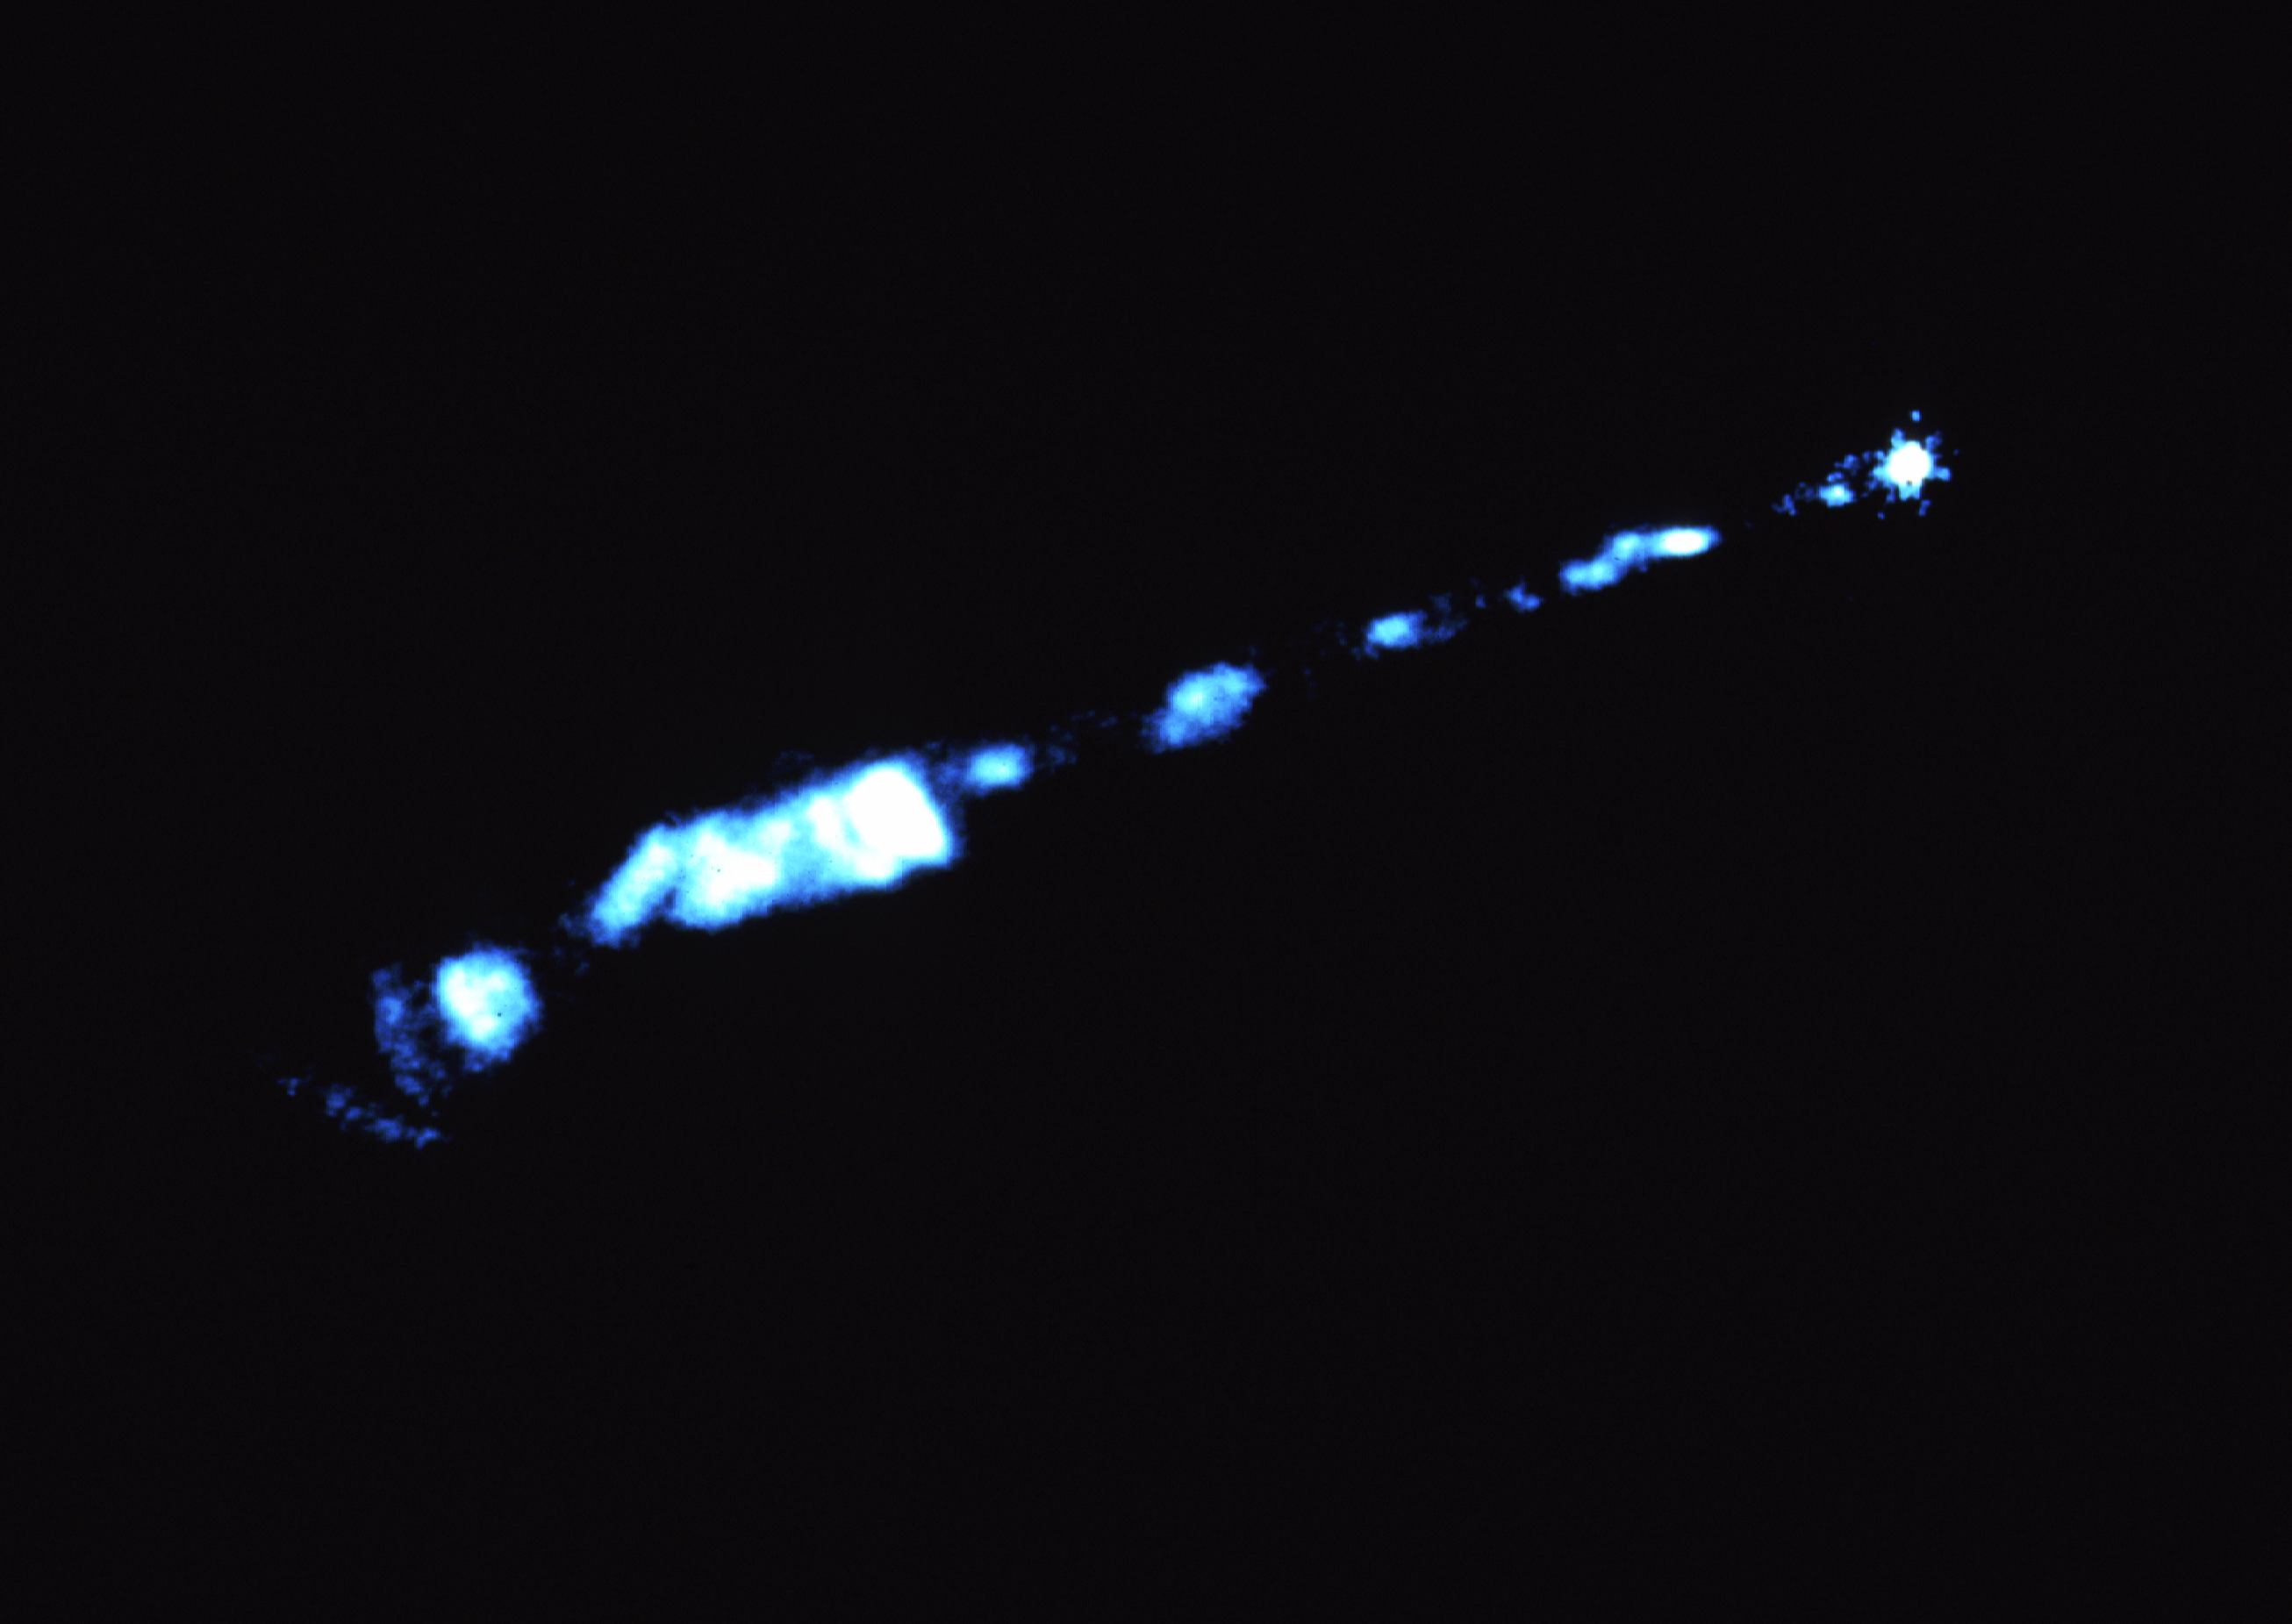

NASA/ESA Hubble Space Telescope yields clear view of optical jet in galaxy M87

A NASA/ESA Hubble Space Telescope href="http://www.spacetelescope.org/about/index.html">HST) view of a 4,000 light-year long jet of plasma emanating from the bright nucleus of the giant elliptical galaxy M87. This ultraviolet light image was made with the European Space Agency's Faint Object Camera (FOC), one of two imaging systems aboard HST. This photo is being presented on Thursday, January 16th at the 179th meeting of the American Astronomical Society meeting in Atlanta, Georgia. M87 is a giant elliptical galaxy with an estimated mass of 300 billion suns. Located 52 million light-years away at the heart of the neighboring Virgo cluster of galaxies, M87 is the nearest example of an active galactic nucleus with a bright optical jet. The jet appears as a string of knots within a widening cone extending out from the core of M87. The FOC image reveals unprecedented detail in these knots, resolving some features as small as ten light-years across. According to one theory, the jet is most likely powered by a 3 billion solar mass black hole at the nucleus of M87. Magnetic fields generated within a spinning accretion disk surrounding the black hole, spiral around the edge of the jet. The fields confine the jet to a long narrow tube of hot plasma and charged particles. High speed electrons and protons which are accelerated near the black hole race along the tube at nearly the speed of light. When electrons are caught up in the magnetic field they radiate in a process called synchrotron radiation. The Faint Object Camera image clearly resolves these localized electron acceleration, which seem to trace out the spiral pattern of the otherwise invisible magnetic field lines. A large bright knot located midway along the jet shows where the blue jet disrupts violently and becomes more chaotic. Farther out from the core the jet bends and dissipates as it rams into a wall of gas, invisible but present throughout the galaxy which the jet has plowed in front of itself. HST is ideally suited for studying extragalactic jets. The Telescope's UV sensitivity allows it to clearly separate a jet from the stellar background light of its host galaxy. What's more, the FOC's high angular resolution is comparable to sub arc second resolution achieved by large radio telescope arrays.

Credit: F. Duccio Macchetto/NASA/ESA